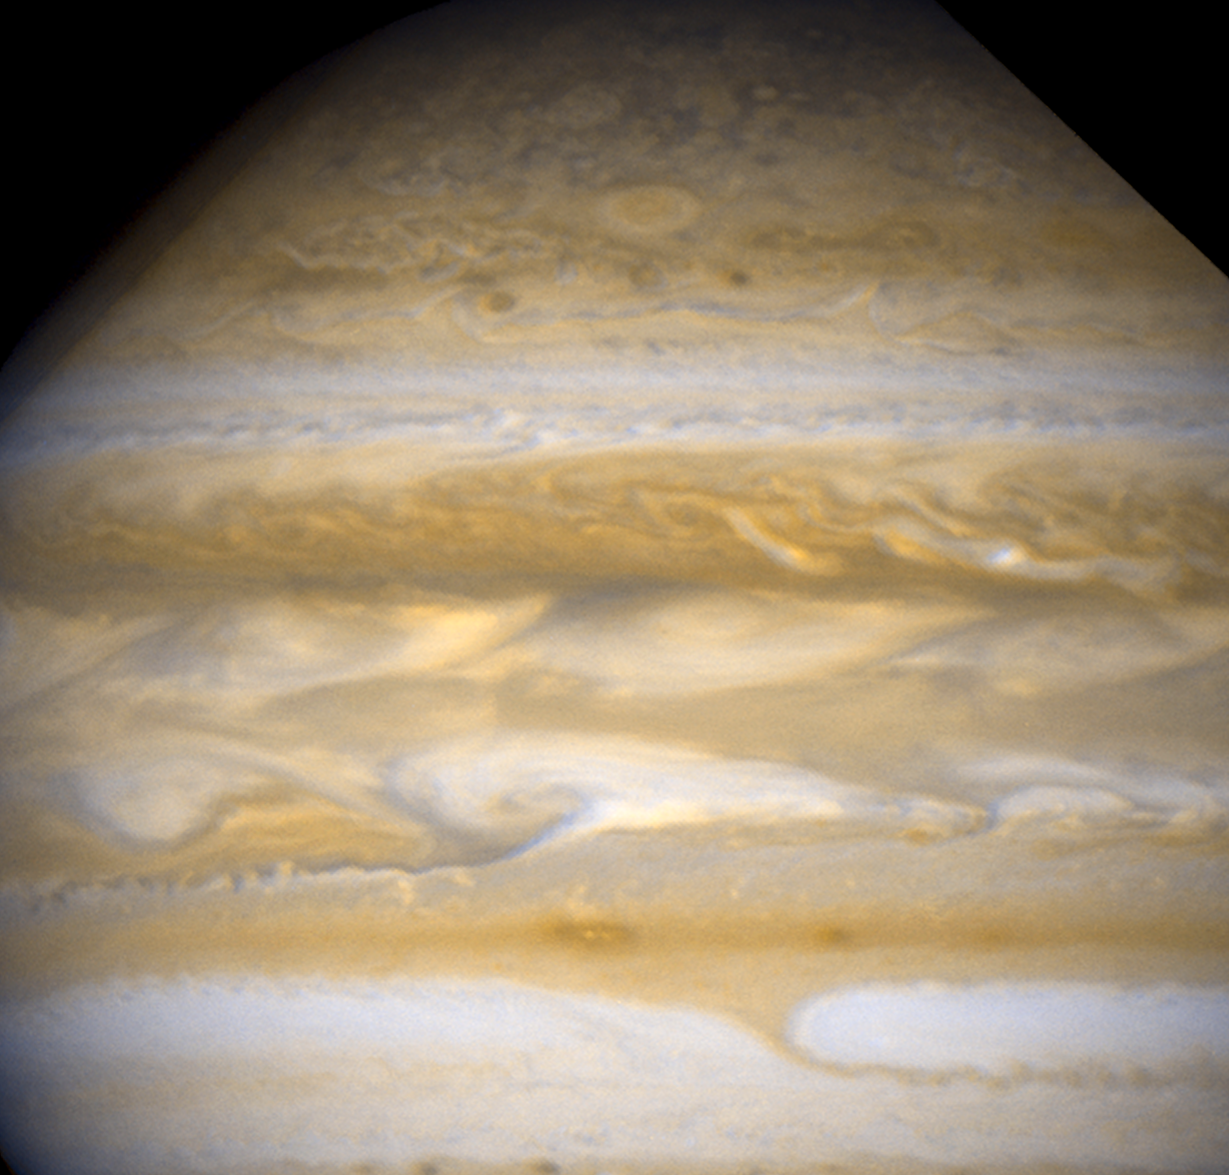

Jupiter - March 25, 2007

This Hubble image reveals a rapid transformation in the shape and color of Jupiter's clouds near the equator, marking an entire face of the globe.

Credit: NASA, ESA, and A. Simon-Miller (NASA Goddard Space Flight Center)